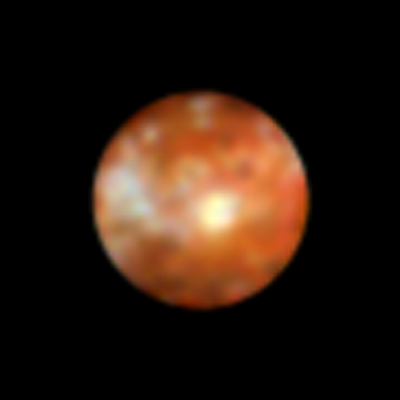

Io

Over the past year Hubble has charted new volcanic activity on Io'sactive surface. Io is one of the four largest Galilean satellites.

Credit: K. Noll (STScI), J. Spencer (Lowell Observatory), and NASA/ESA